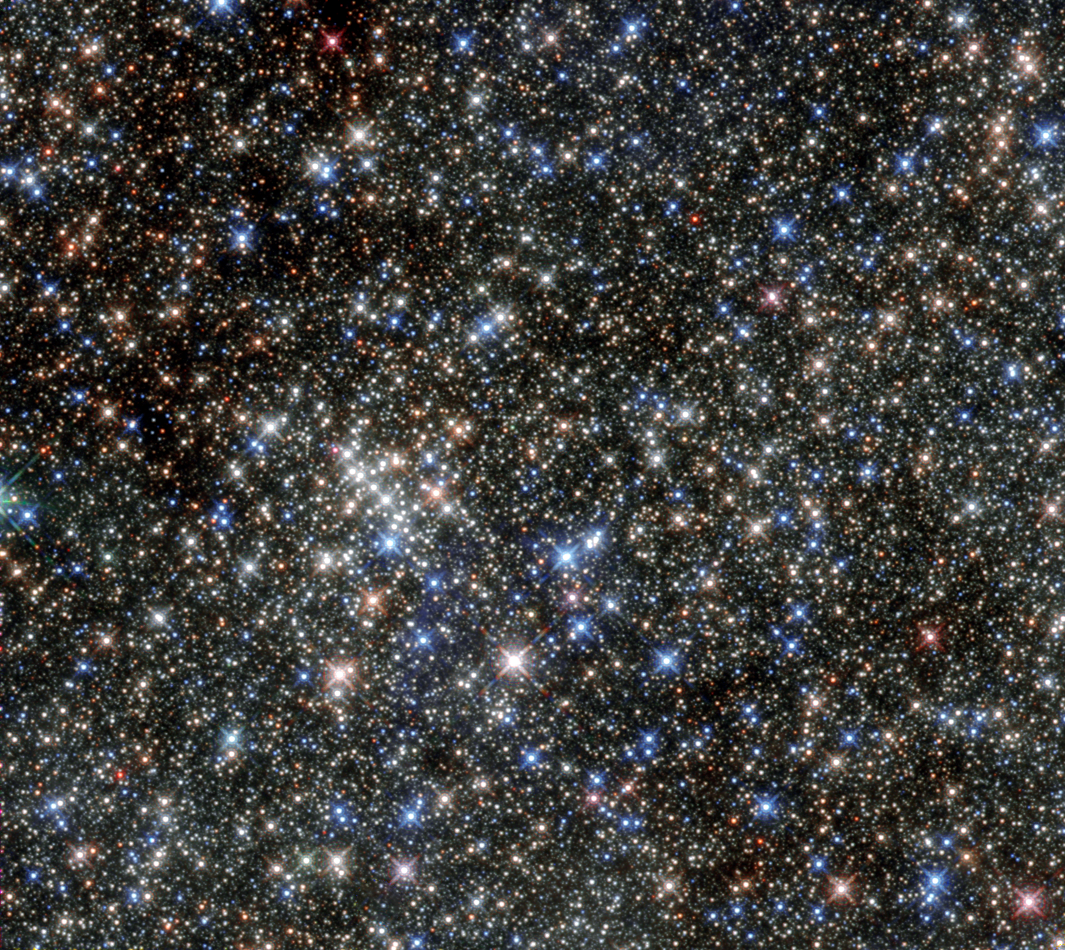

Uncovering the secrets of the Quintuplet Cluster

Although this cluster of stars gained its name due to its five brightest stars, it is home to hundreds more. The huge number of massive young stars in the cluster is clearly captured in this NASA/ESA Hubble Space Telescope image.

The cluster is located close to the Arches Cluster and is just 100 light-years from the centre of our galaxy. The cluster’s proximity to the dust at the centre of the galaxy means that much of its visible light is blocked, which helped to keep the cluster unknown until its discovery in 1990, when it was revealed by observations in the infrared. Infrared images of the cluster, like the one shown here, allow us to see through the obscuring dust to the hot stars in the cluster.

The Quintuplet Cluster hosts two extremely rare luminous blue variable stars: the Pistol Star and the lesser known V4650 Sgr. If you were to draw a line horizontally through the centre of this image from left to right, you could see the Pistol Star hovering just above the line about one third of the way along it. The Pistol Star is one of the most luminous known stars in the Milky Way and takes its name from the shape of the Pistol Nebula that it illuminates, but which is not visible in this infrared image. The exact age and future of the Pistol Star are uncertain, but it is expected to end in a supernova or even a hypernova in one to three million years.

The cluster also contains a number of red supergiants. These stars are among the largest in the galaxy and are burning their fuel at an incredible speed, meaning they will have a very short lifetime. Their presence suggests an average cluster age of nearly four million years. At the moment these stars are on the verge of exploding as supernovae. During their spectacular deaths they will release vast amounts of energy which, in turn, will heat the material — dust and gas — between the other stars.

This observation shows the Quintuplet Cluster in the infrared and demonstrates the leap in Hubble’s performance since its 1999 image of same object.

Credit: ESA/Hubble & NASA